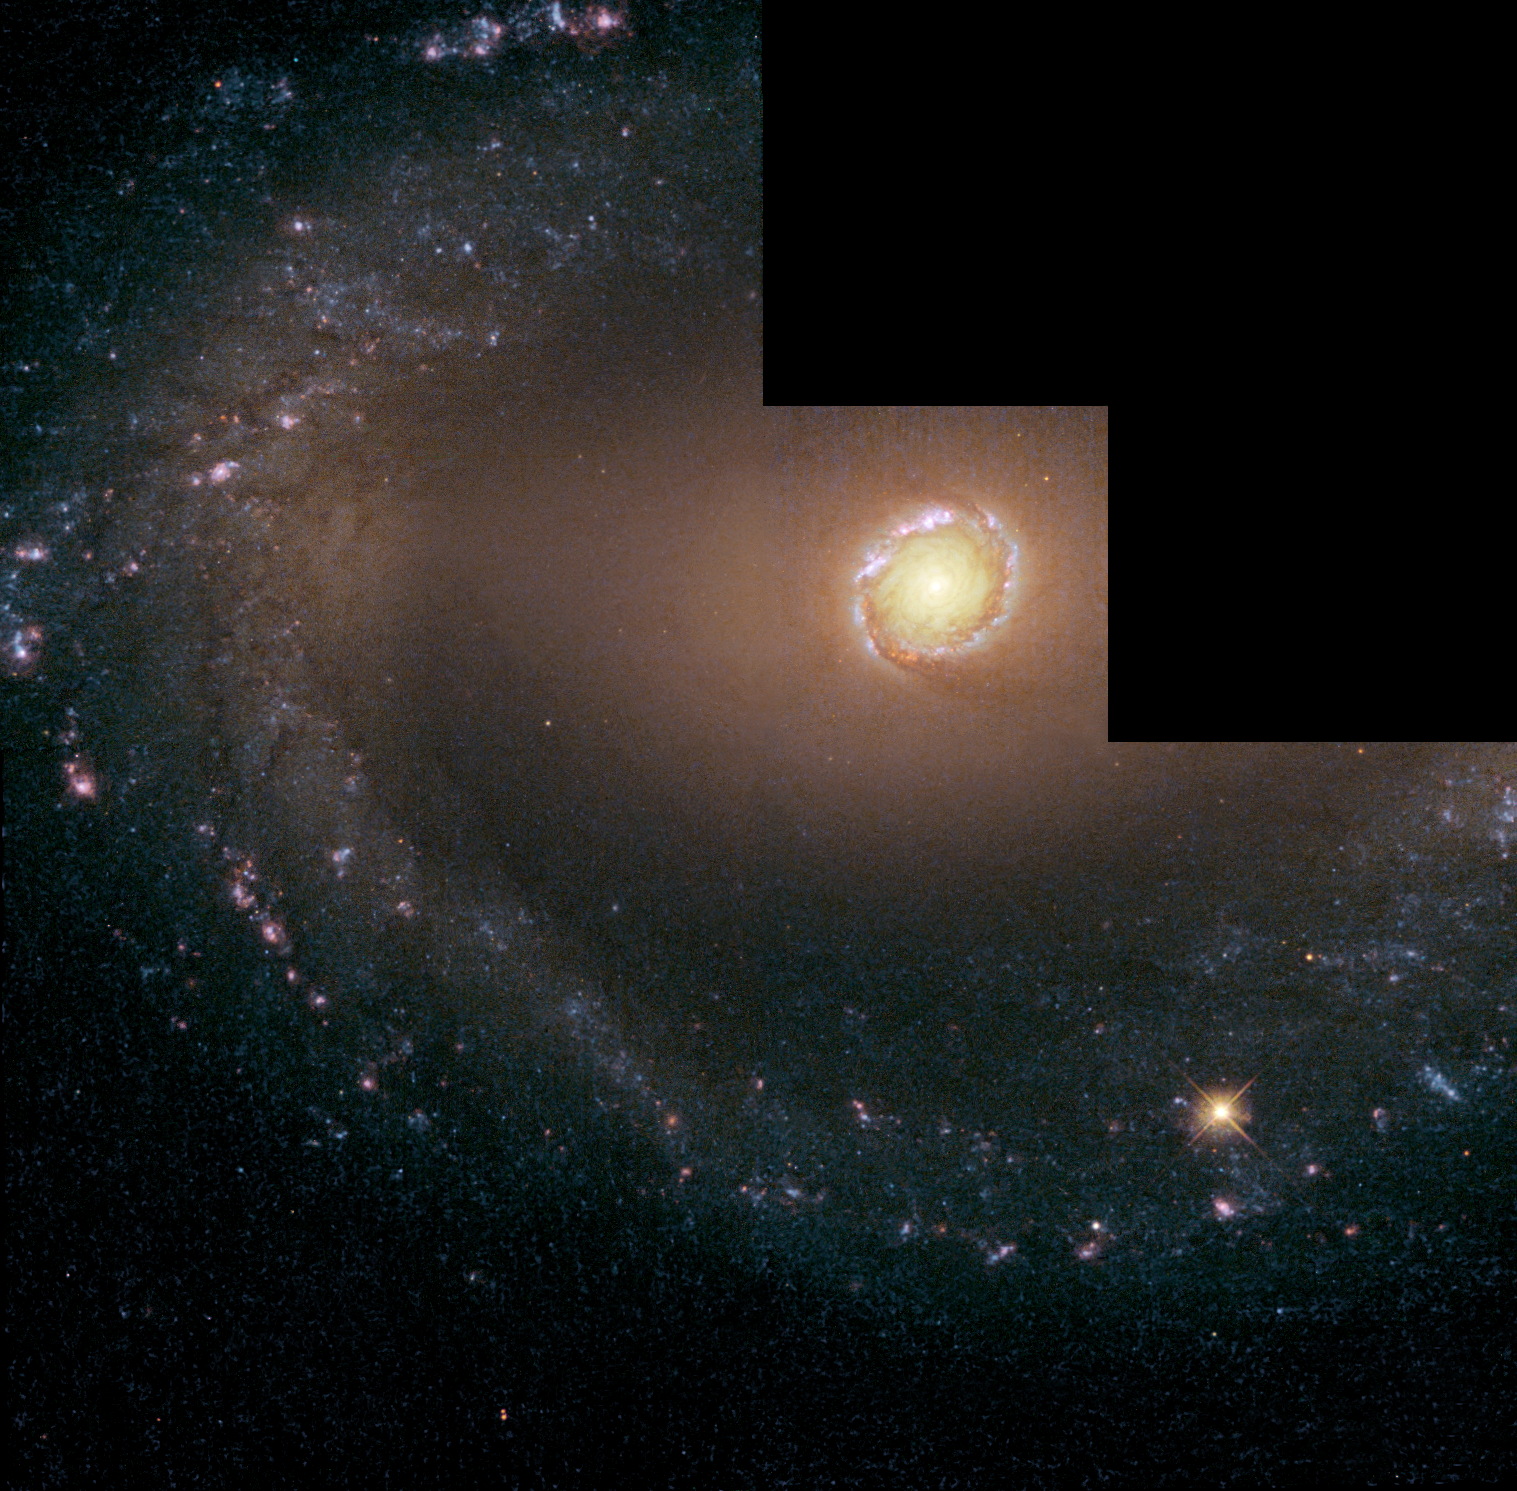

Wide view of NGC 1512

The NASA/ESA Hubble Space Telescope's Wide Field and Planetary Camera 2 snapped this wide view of the nearby barred spiral galaxy NGC 1512. NGC 1512 is in the southern constellation of Horologium at a distance of 9.2 million parsec or 30 million light years). The galaxy is 70 000 light years across and the circumnuclear starburst ring (at the very centre) is 2400 light years wide.

A wispy bar of material can barely be seen slicing horizontally through the galaxy. This bar is funnelling gas into the heart of the galaxy, fuelling a ring of star birth. Blue stars and red star-forming clouds of glowing hydrogen trace the grand spiral arms along the galaxy's outer edge.

The image was taken on 18 July, 1993, and has a total exposure time of 9700 s distributed on four filters represented by the colours blue (338 nm), green (545 nm), orange (659 nm) and red (827 nm).

This image is issued jointly by NASA and ESA.

Credit: NASA, ESA, Dan Maoz (Tel-Aviv University, Israel, and Columbia University, USA)